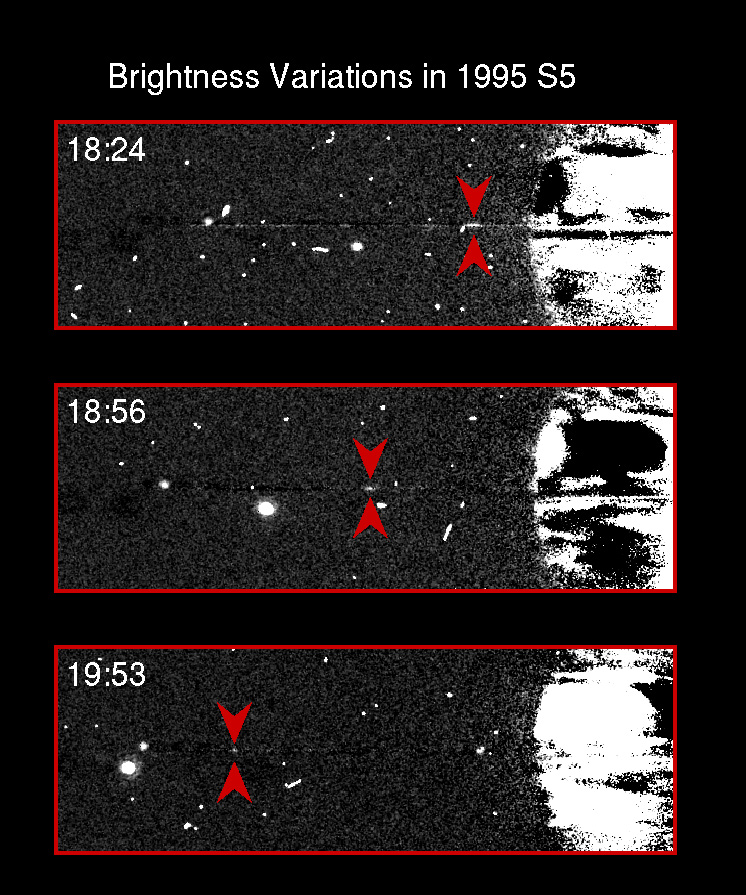

Brightness variations in Saturn's satellite 1995S5

This sequence of 100 sec exposures taken with HST's Wide Field andPlanetary Camera (WFPC2) in planetary mode on 10 August 1995 shows thenewly discovered object 1995S5 (red arrows) moving in its orbit aroundthe planet. As it moves further from Saturn, its brightness decreasesappreciably. This brightness variation is more consistent with thatexpected for an elongated, opaque clump of ring material than for asatellite, leading to the suspicion that 1995S5 is in fact a ring arcrather than a previously undiscovered satellite. It is likely that itlies within the narrow, braided F Ring.

In addition to 1995S5, the larger satellites Mimas and Epimetheus arevisible in each frame. Mimas is the bright object below the rings,and is seen partly shadowed by the rings in the first frame. Insubsequent frames it is in full sunlight. Epimetheus is near theeastern ansa of the rings, moving slowly outward. In the last frame ofthe sequence tiny Pandora has emerged from Saturn's shadow about 2arcsec from the planet's limb.

Credit: Phil Nicholson (Cornell University), Mark Showalter (NASA/ESA-Ames/Stanford) and NASA/ESA